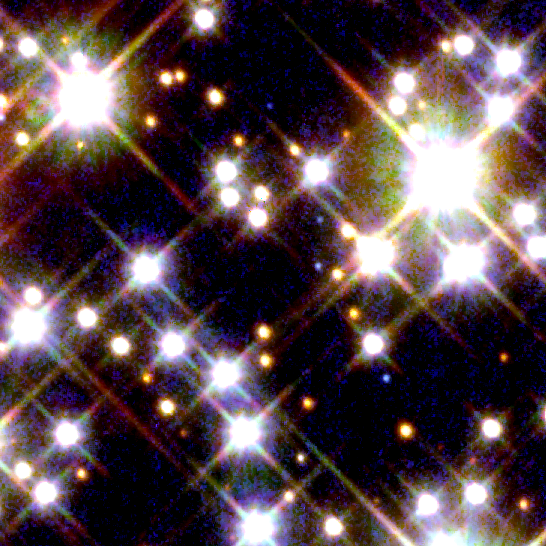

Globular Cluster M4 - HST/WFPC2 Image

In this image, a Pulsar with Companion in Globular Cluster is visible. M4 is roughly 5,600 light-years (1,720 parsecs) from the Earth.

Credit: NASA/ESA and H. Richer (University of British Columbia)